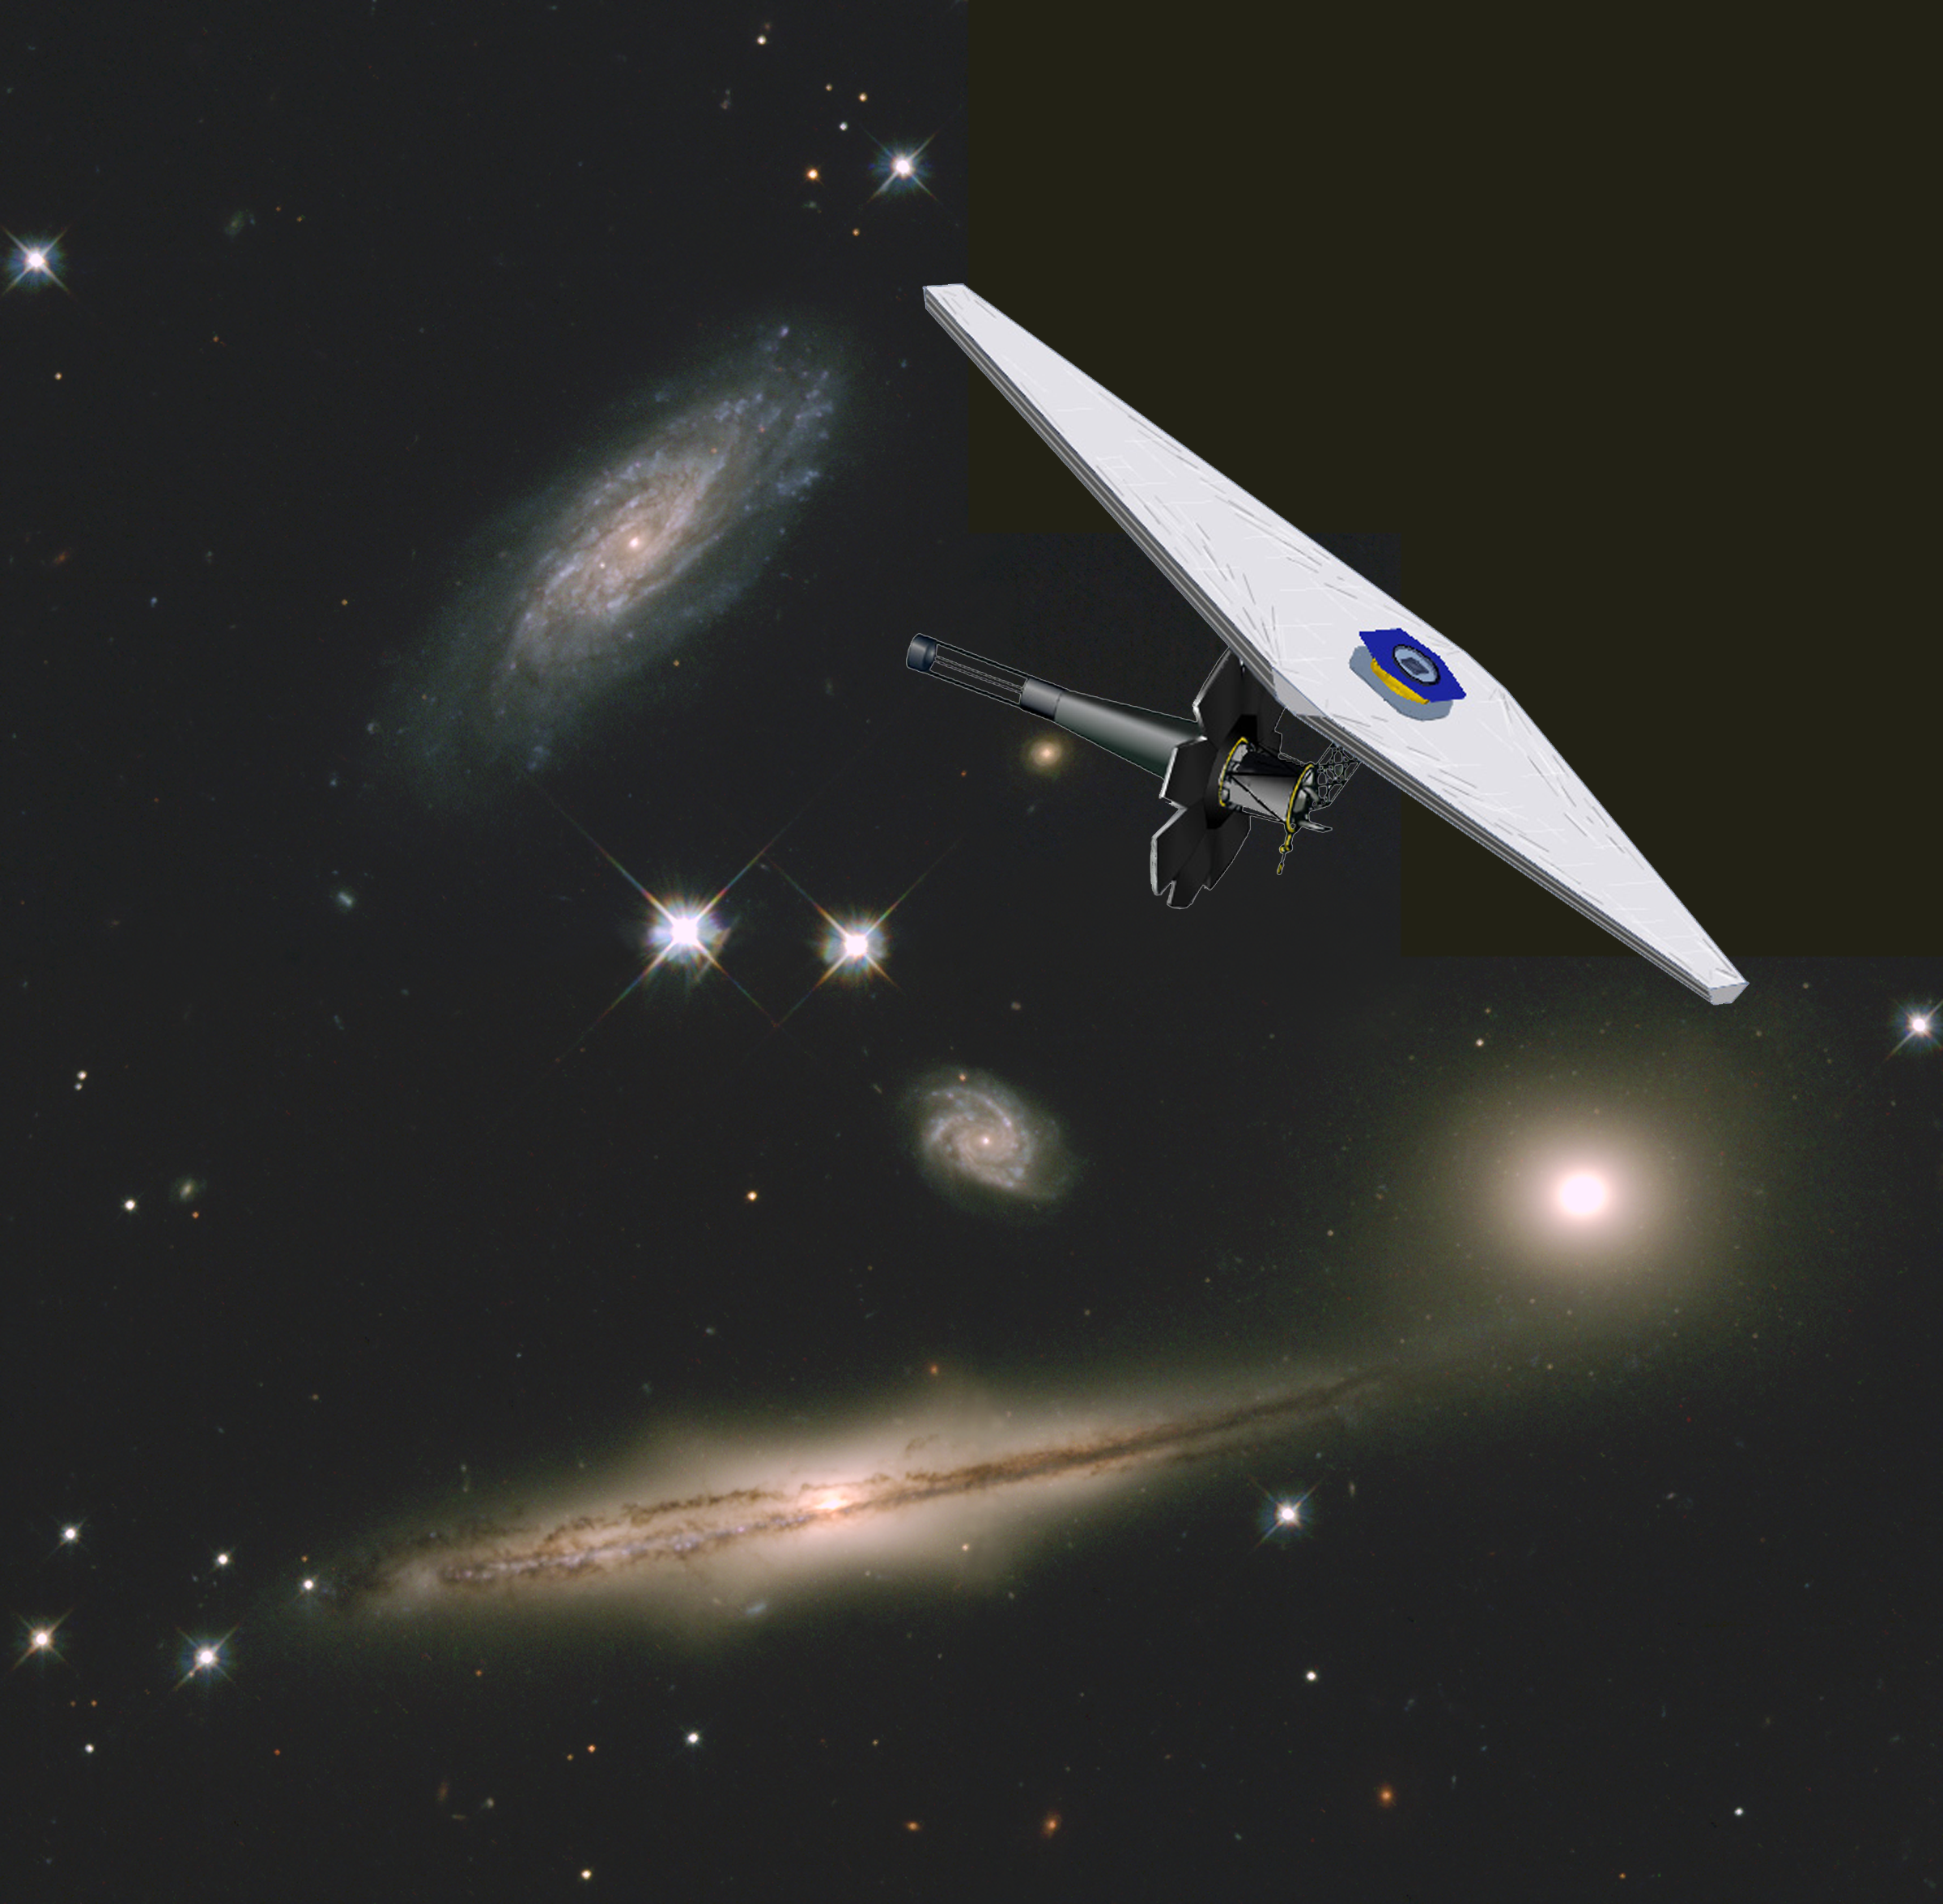

The James Webb Space Telescope

The James Webb Space Telescope peers into the cosmos.

Credit: ESA